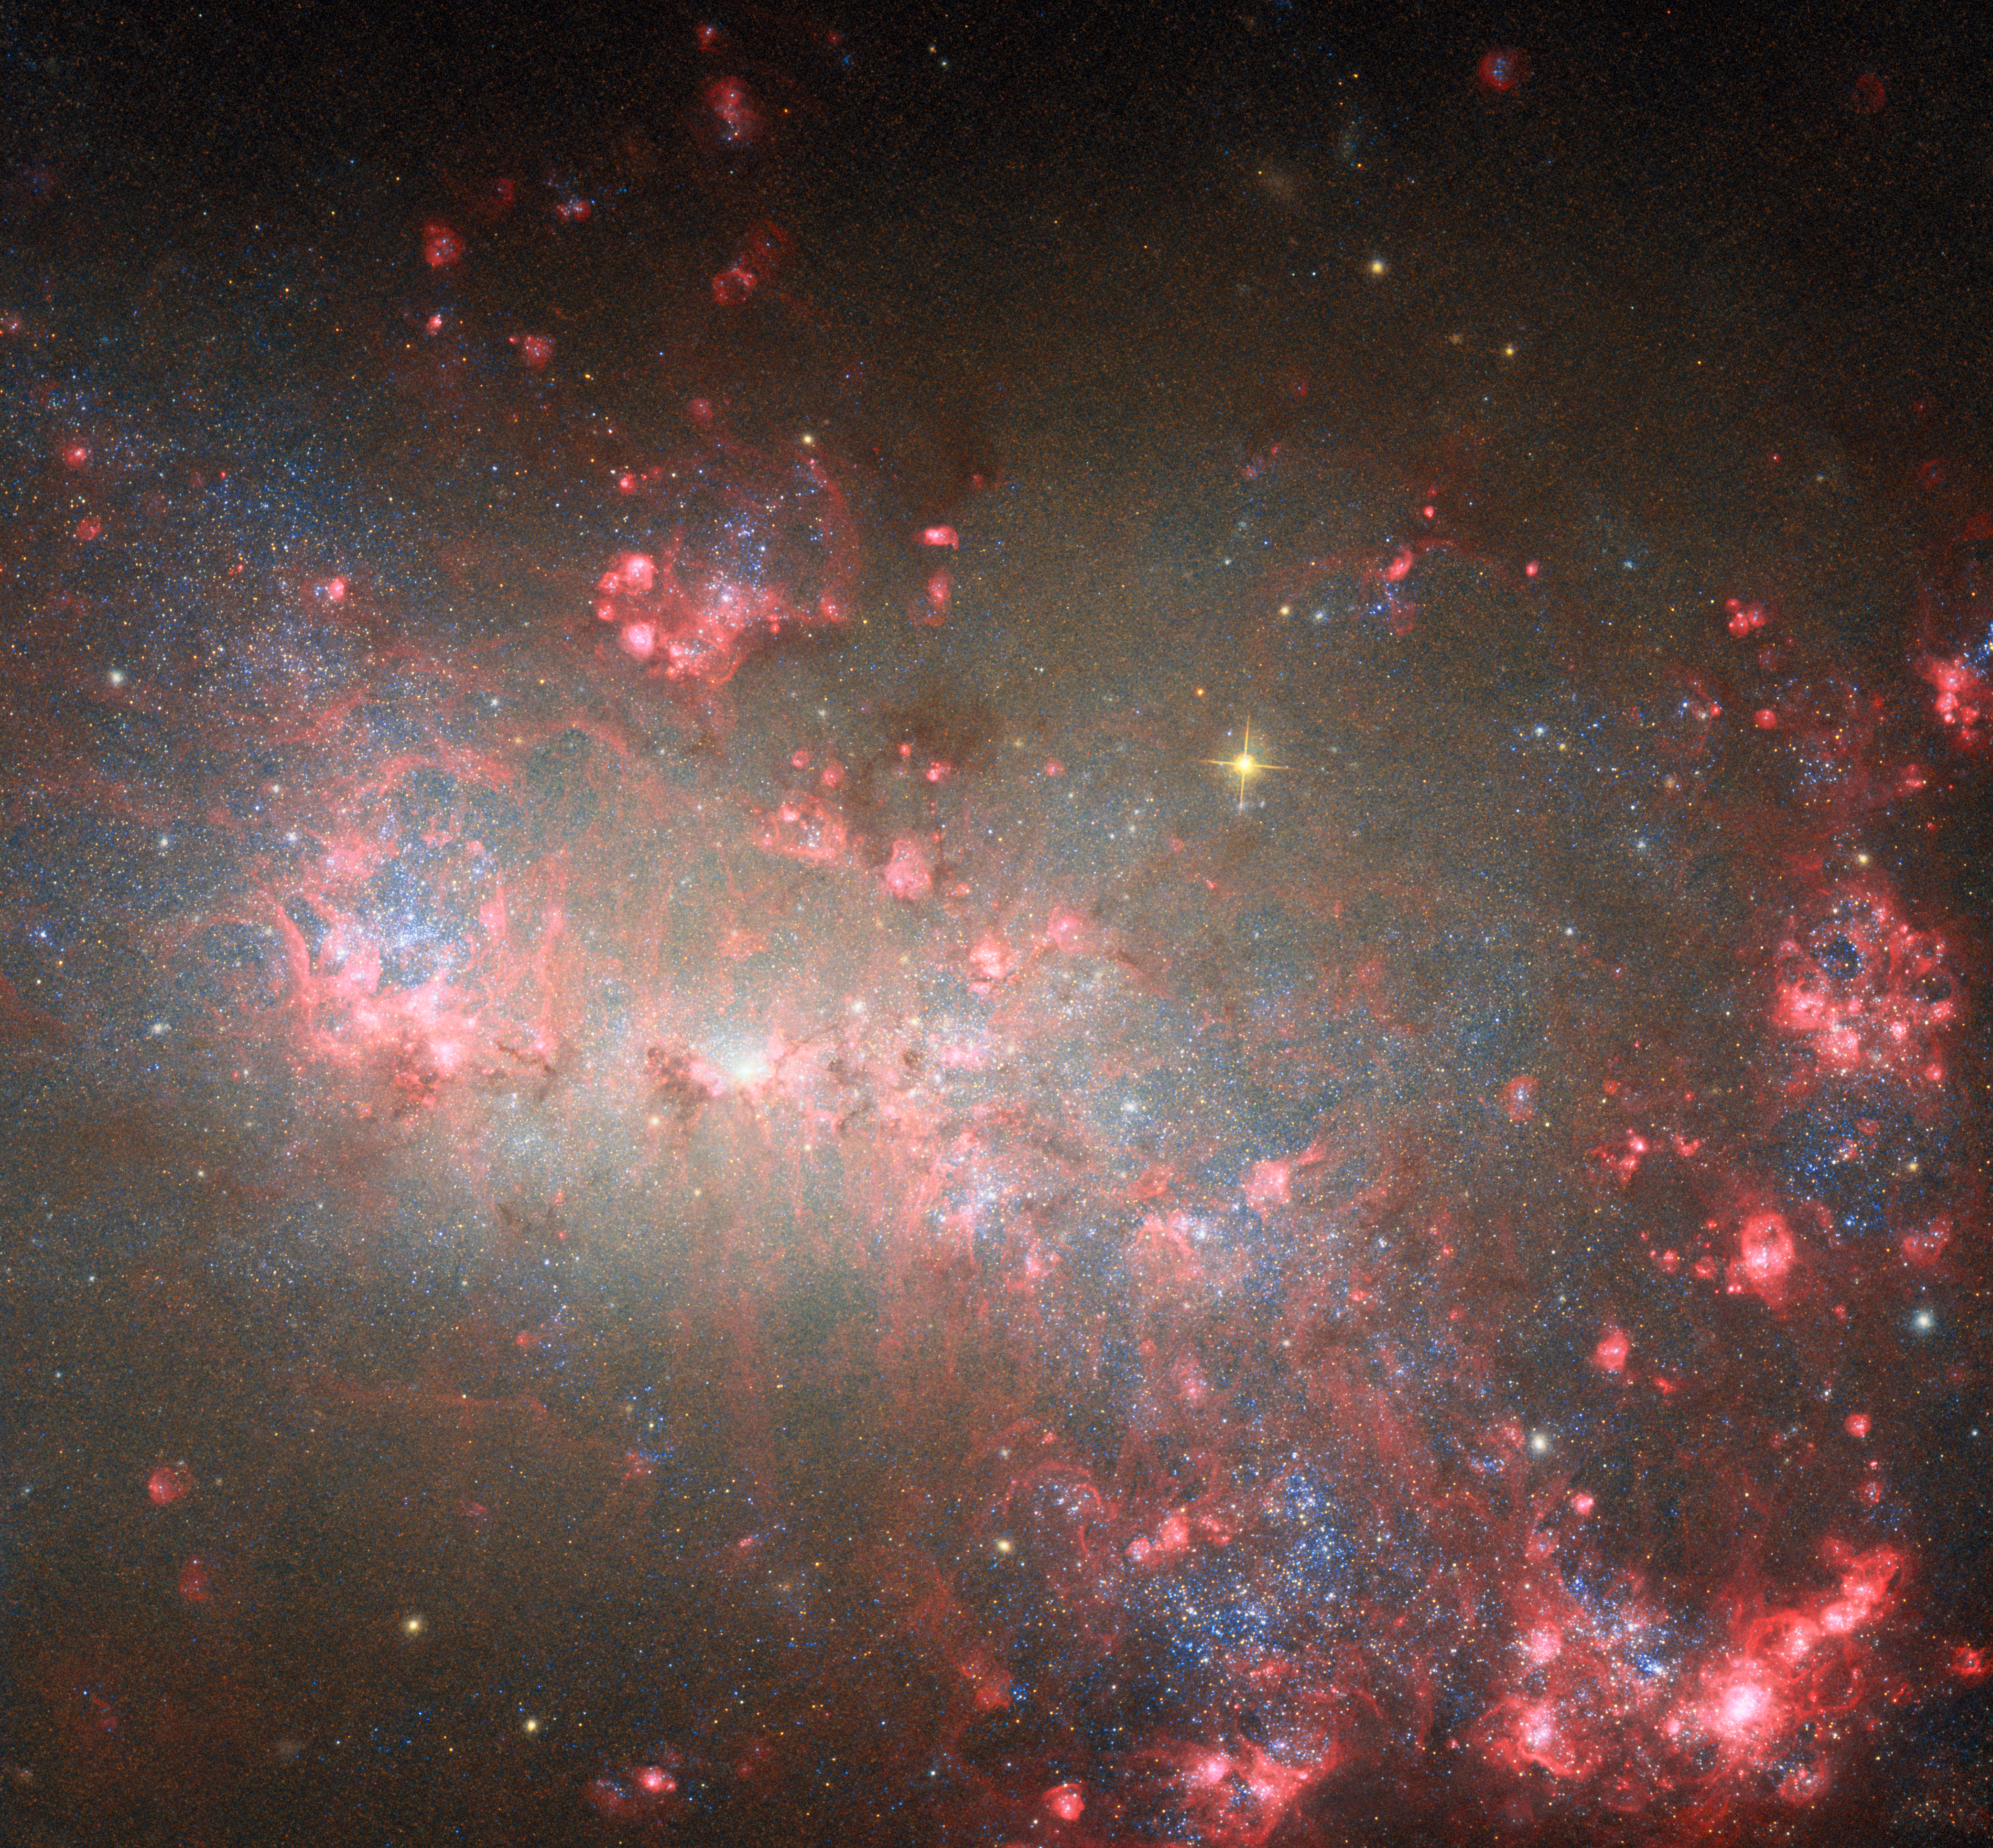

Small but mighty

This portrait from the NASA/ESA Hubble Space Telescope puts the nearby galaxy NGC 4449 in the spotlight. The galaxy is situated just 12.5 million light-years away in the constellation Canes Venatici (The Hunting Dogs). It is a member of the M94 galaxy group, which is near the Local Group of galaxies to which the Milky Way belongs.

NGC 4449 is a dwarf galaxy, which means that it is far smaller and contains fewer stars than the Milky Way. But don’t let its small size fool you — NGC 4449 packs a punch when it comes to making stars! This galaxy is currently forming new stars at a much faster rate than expected for its size, which makes it known as a starburst galaxy. Most starburst galaxies churn out stars mainly in their centres, but NGC 4449 is alight with brilliant young stars throughout. Researchers believe that this global burst of star formation came about because of NGC 4449’s interactions with its galactic neighbours. Because NGC 4449 is so close, it provides an excellent opportunity for Hubble to study how interactions between galaxies can influence the formation of new stars.

A Hubble image of NGC 4449 was previously released in 2007. This new version incorporates several additional wavelengths of light that Hubble collected for multiple observing programmes. These programmes encompass an incredible range of science, from a deep dive into NGC 4449’s star-formation history to the mapping of the brightest, hottest, and most massive stars in more than two dozen nearby galaxies.

The NASA/ESA/CSA James Webb Space Telescope has also observed NGC 4449, revealing in intricate detail the galaxy’s tendrils of dusty gas, glowing from the intense starlight radiated by the flourishing young stars.

Credit: ESA/Hubble & NASA, E. Sabbi, D. Calzetti, A. Aloisi